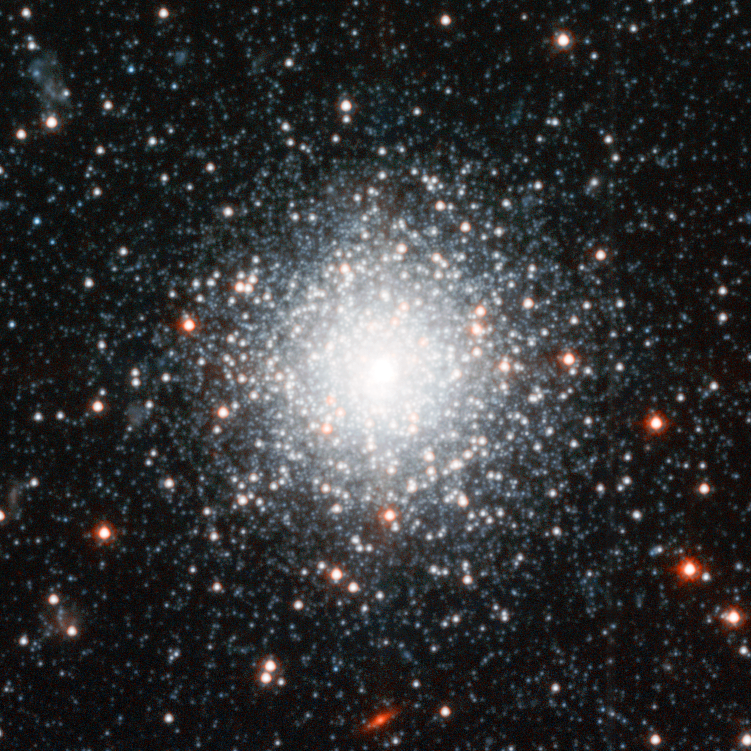

Andromeda Galaxy Halo Details - 6

Relying on the deepest visible-light images ever taken in space, astronomers using NASA's Hubble Space Telescope (HST) have reliably measured the age of the spherical halo of stars surrounding the neighboring Andromeda galaxy (M31). To their surprise, they have discovered that approximately one-third of the stars in Andromeda's halo formed only 6 to 8 billion years ago. That's a far cry from the 11-to-13 billion-year age of the stars in the Milky Way's halo.

Credit: NASA, ESA and T.M. Brown (STScI)